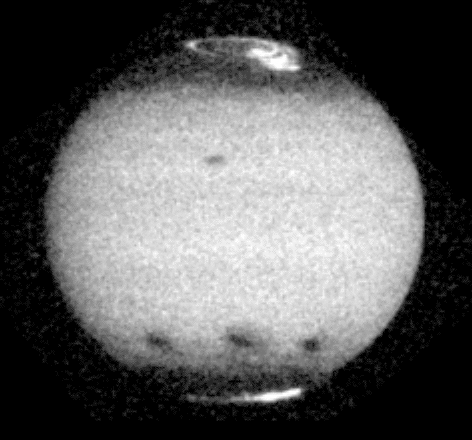

Jupiter comet impact

This image shows the aftermath of comet P/Shoemaker-Levy 9's impact with Jupiter. The impact sites of fragments C, A and E are visible on the southern hemisphere, from left to right and this image was taken about 12, 23, and 4 hours after each collision. Jupiter's satellite 10 is seen crossing above the center of the disk, and the famous Great Red Spot is near the eastern limb.

Credit: NASA & ESA